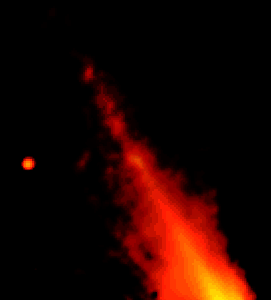

Beta Pictoris Disk Hides Giant Elliptical Ring System

The planetary dust disk around the star Beta Pictoris is dynamically 'ringing like a bell, ' according to astronomers investigating NASA/ESA Hubble Space Telescope images. The 'clapper' is the gravitational wallop of a star that passed near Beta Pictoris some 100, 000 years ago.

Credit: NASA/ESA and Paul Kalas ( Space Telescope Science Institute)